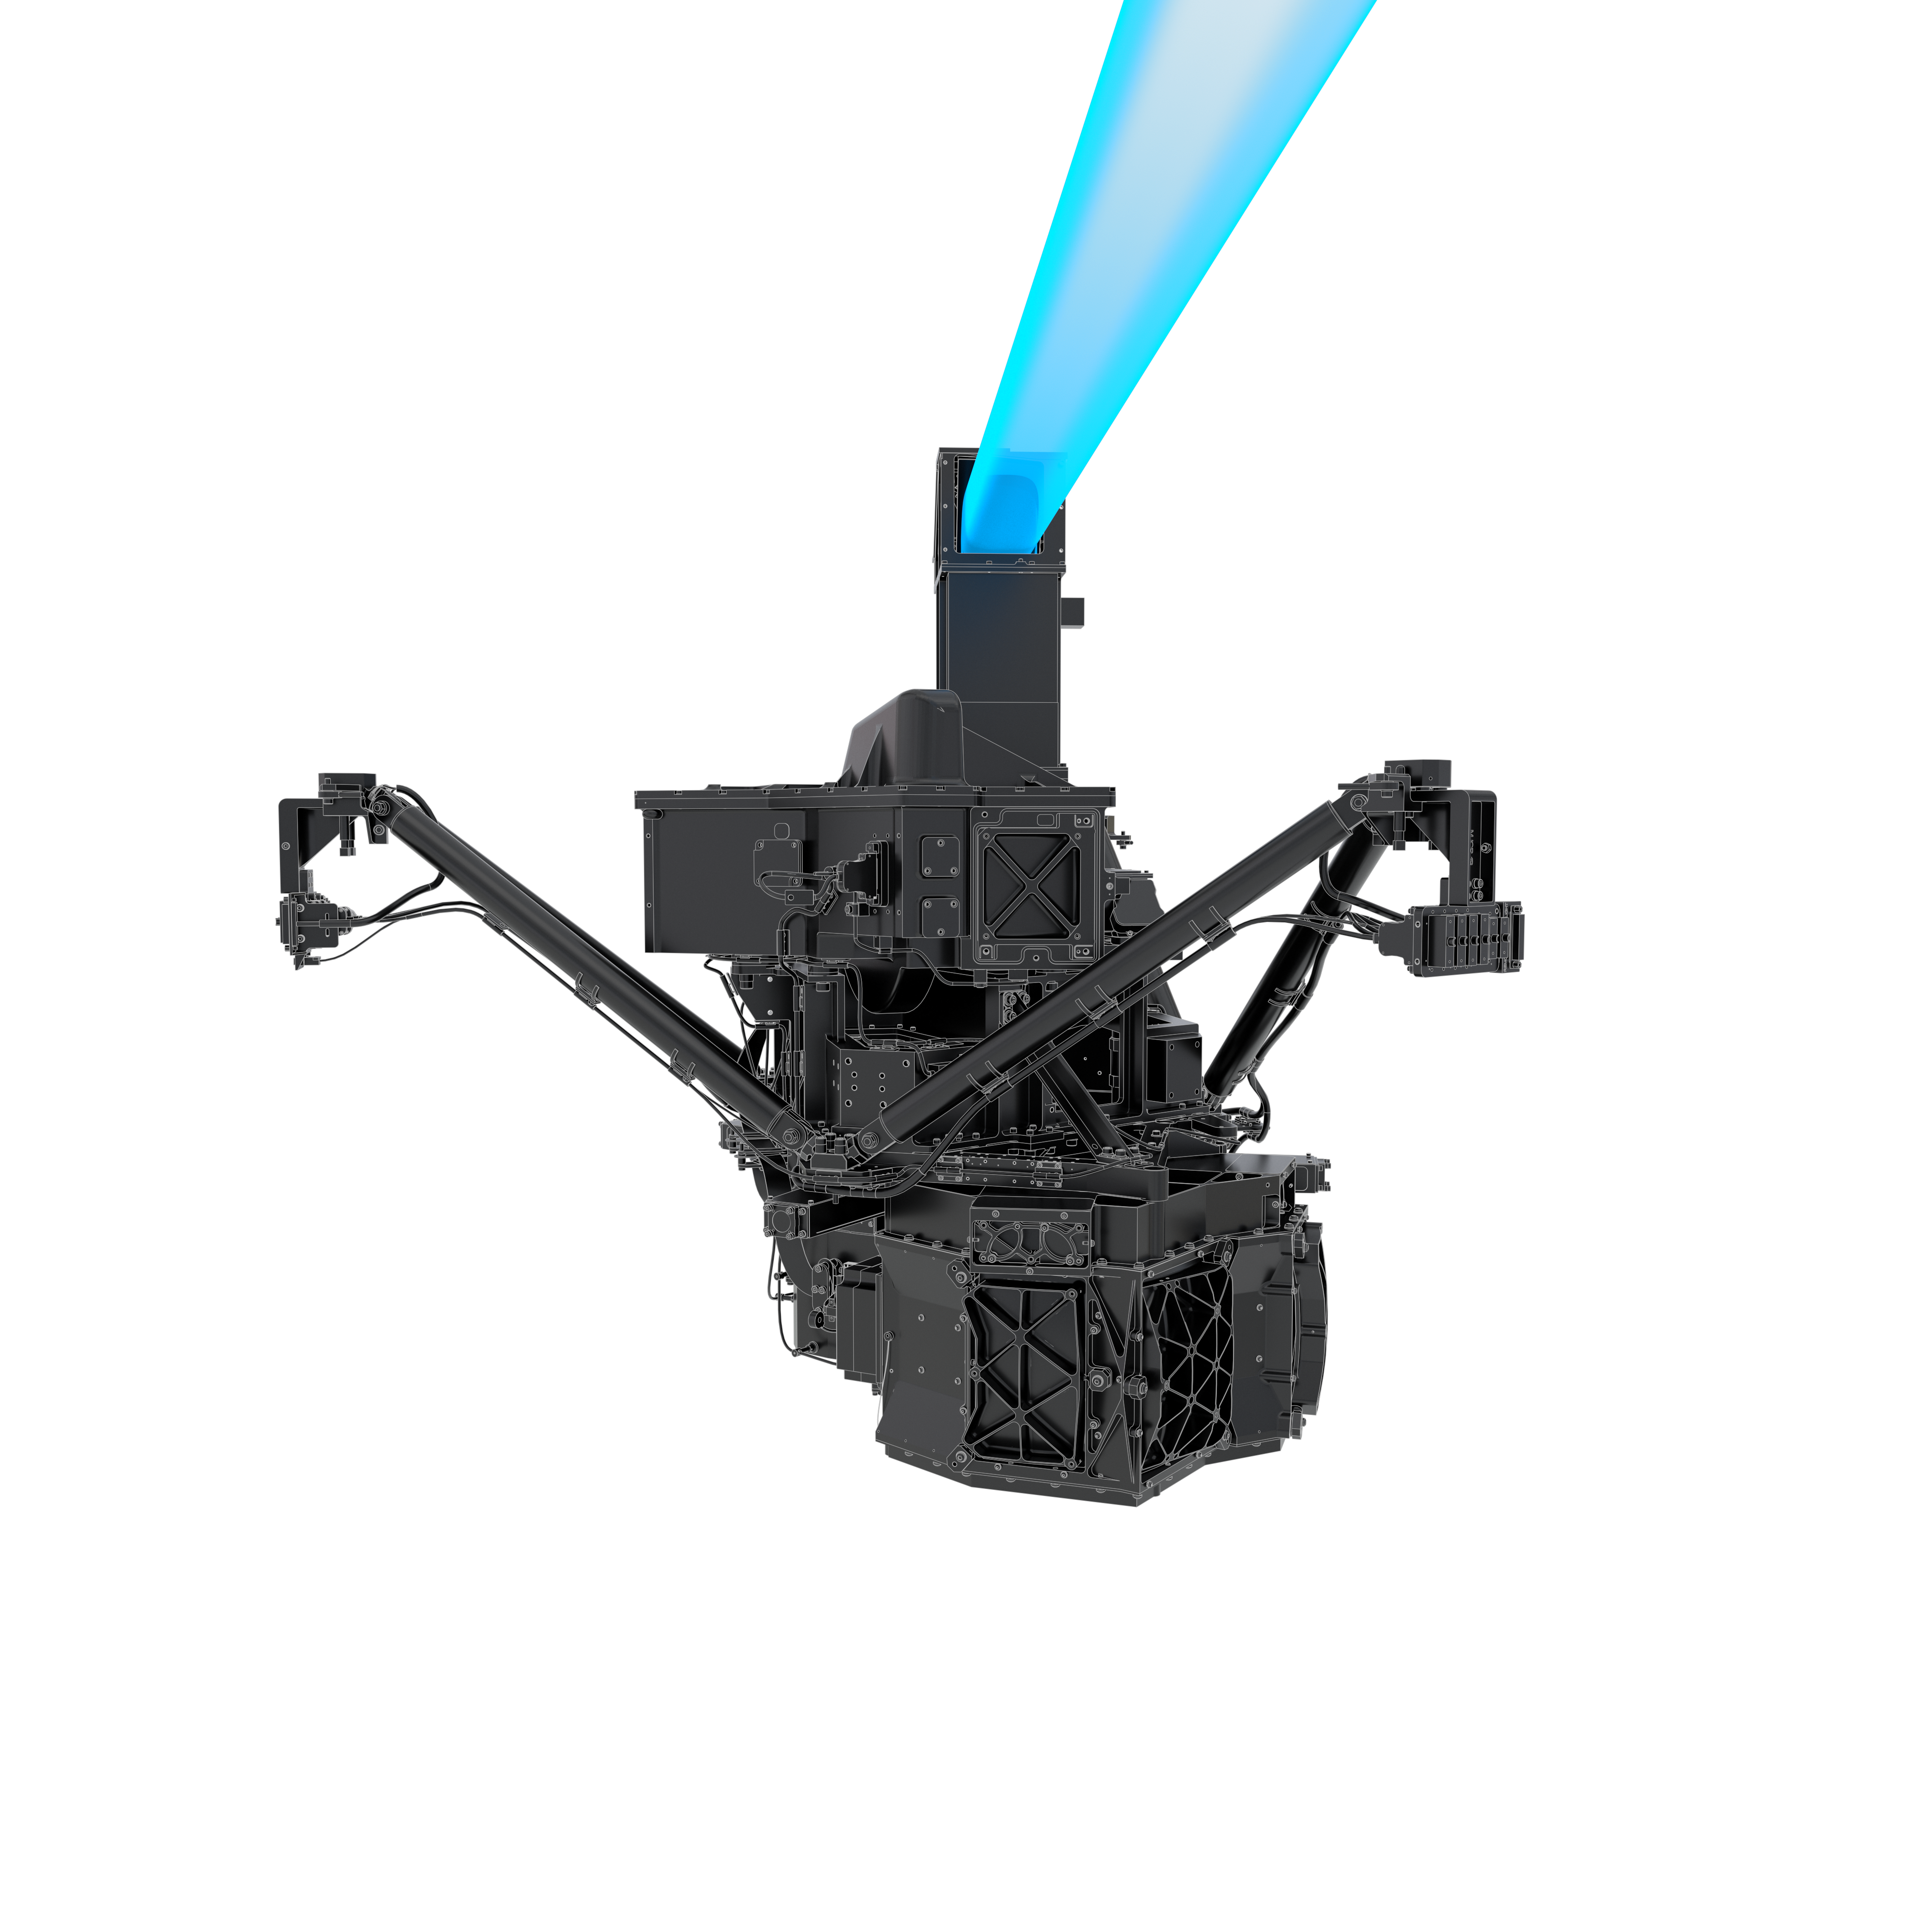

Webb MIRI instrument

Artist rendering of the James Webb Space Telescope mid-infrared camera and spectrograph (MIRI).

Credit: ESA/ATG medialab